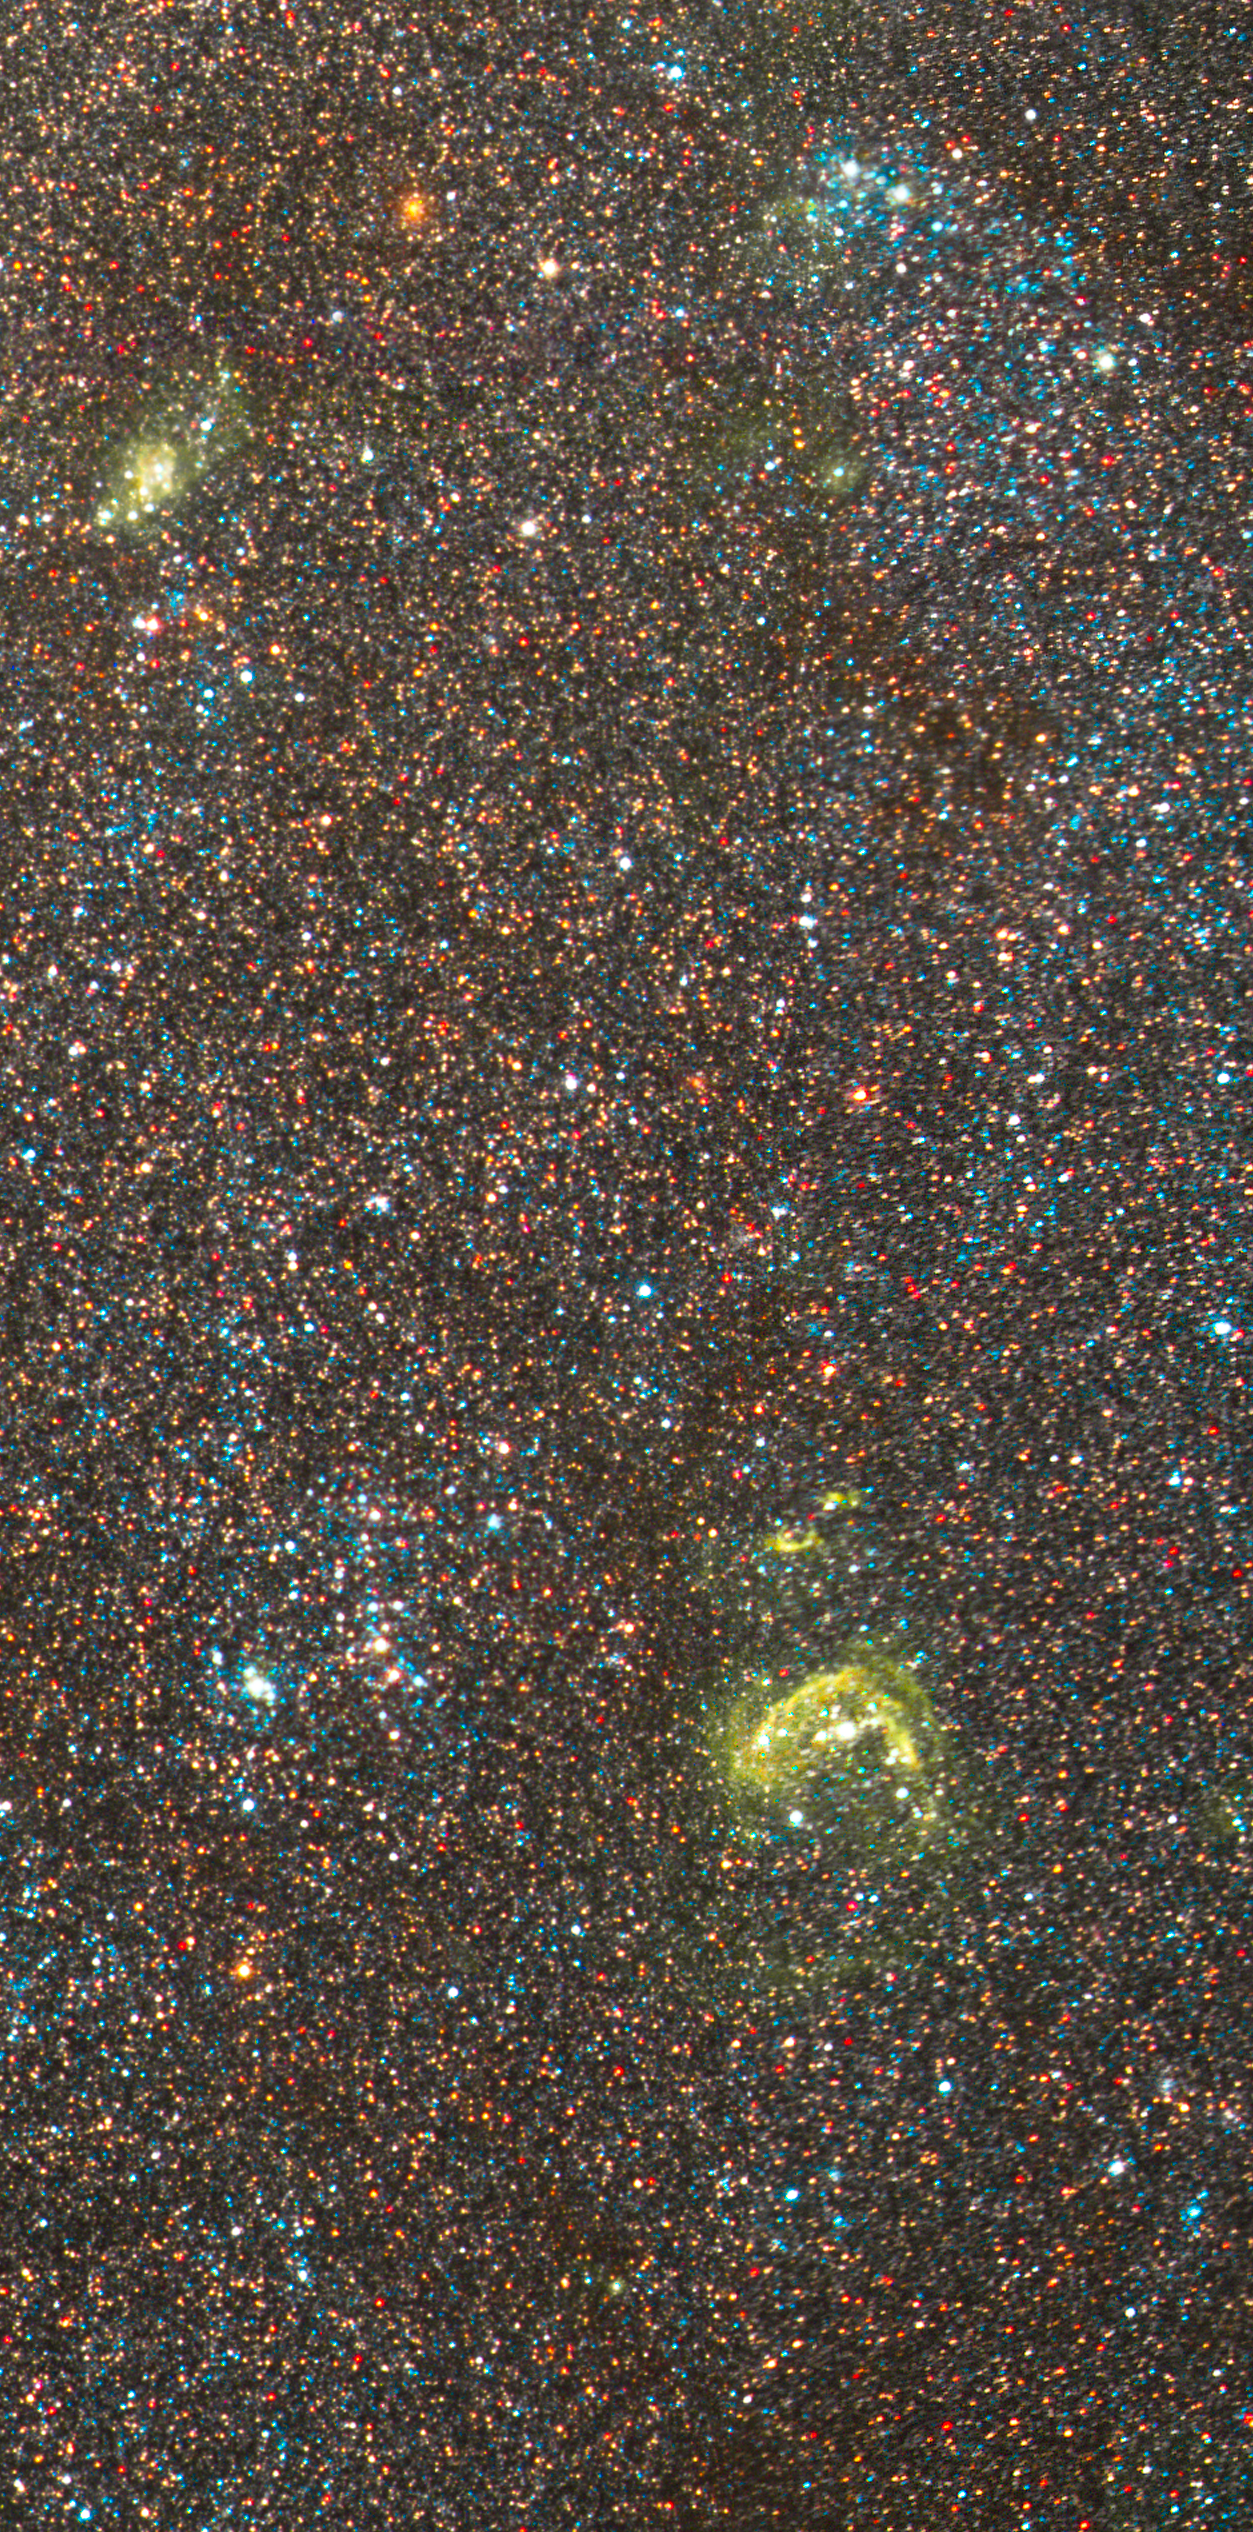

NGC 300 Detail 2

Hubble's Advanced Camera for Surveys shows individual stars, clusters of stars and nebulae in the spiral galaxy NGC 300, located approximately 7 million light-years away from Earth. The image shows a star-forming region a few thousand light-years farther from the galaxy's centre. The yellow nebulosities are the glow from hot gas that has been heated by radiation from the nearest young, blue stars. The image at far right reveals more diffuse groupings of young, blue stars, farther away from the galaxy's centre, along with faint shells of hot gas.

Credit: NASA, ESA, J. Dalcanton and B. Williams (University of Washington)